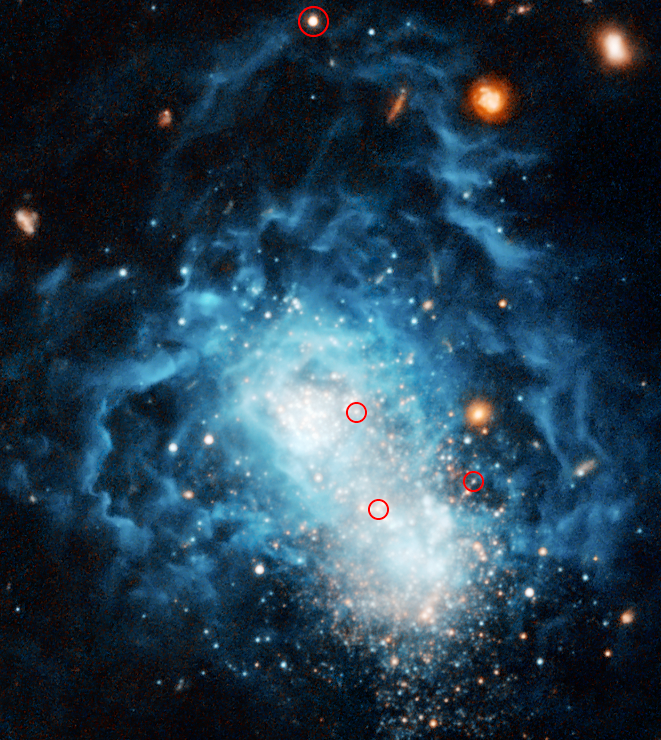

Youthful-looking galaxy may be an adult

The NASA/ESA Hubble Space Telescope quashed the possibility that what was previously believed to be a toddler galaxy in the nearby universe may actually be considered an adult. Called I Zwicky 18, this galaxy has a youthful appearance that resembles galaxies typically found only in the early universe. Hubble has now found faint, older stars within this galaxy, suggesting that the galaxy may have formed at the same time as most other galaxies.

Hubble data also allowed astronomers for the first time to identify Cepheid variable stars in I Zwicky 18, marked by the red circles. These flashing stellar mile-markers were used to determine that I Zwicky 18 is 59 million light-years from Earth, almost 10 million light-years more distant than previously believed.

I Zwicky 18 is classified as a dwarf irregular galaxy and is much smaller than our Milky Way Galaxy. The concentrated bluish-white knots embedded in the heart of the galaxy are two major starburst regions where stars are forming at a furious rate. The wispy blue filaments surrounding the central starburst regions are bubbles of gas that have been blown away by stellar winds and supernovae explosions from a previous generation of hot, young stars. This gas is now heated by intense ultraviolet radiation unleashed by hot, young stars.

Besides the bluish-white young stars, white-reddish stars also are visible in both I Zwicky 18 and its companion. These stars may be as old as 10 billion years. The reddish extended objects surrounding I Zwicky 18 and its companion are ancient, fully formed galaxies of different shapes that are much farther away.

Hubble data also allowed astronomers for the first time to identify Cepheid variable stars in I Zwicky 18. These flashing stellar mile-markers were used to determine that I Zwicky 18 is 59 million light-years from Earth, almost 10 million light-years more distant than previously believed.

The observations of I Zwicky 18 were taken in 2005 and 2006 with Hubble's Advanced Camera for Surveys. Astronomers made this image by combining observations taken with blue and red filters.

The science team consists of Alessandra Aloisi and Marco Sirianni of the European Space Agency and Space Telescope Science Institute; Francesca Annibali, Jennifer Mack, and Roeland van der Marel of the Space Telescope Science Institute; Abhijit Saha of the National Optical Astronomy Observatories; and Gisella Clementini, Rodrigo Contreras, Giuliana Fiorentino, Marcella Marconi, Ilaria Musella, and Monica Tosi of the Italian National Astrophysics Institutes in Bologna and Naples.

Credit: NASA, ESA, and A. Aloisi (European Space Agency and Space Telescope Science Institute)